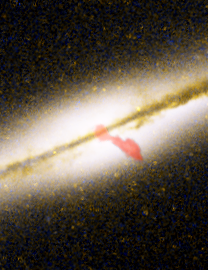

Close-up of 0313-192

This is a composite image of galaxy 0313-192, the first spiral galaxy known to be producing a giant radio-emitting jet. This close-up of the Hubble telescope image has a red overlay from a higher-resolution Very Large Array picture showing the inner portion of the jet.

Credit: NASA/ESA, NRAO/AUI/NSF and W. Keel (University of Alabama, Tuscaloosa)